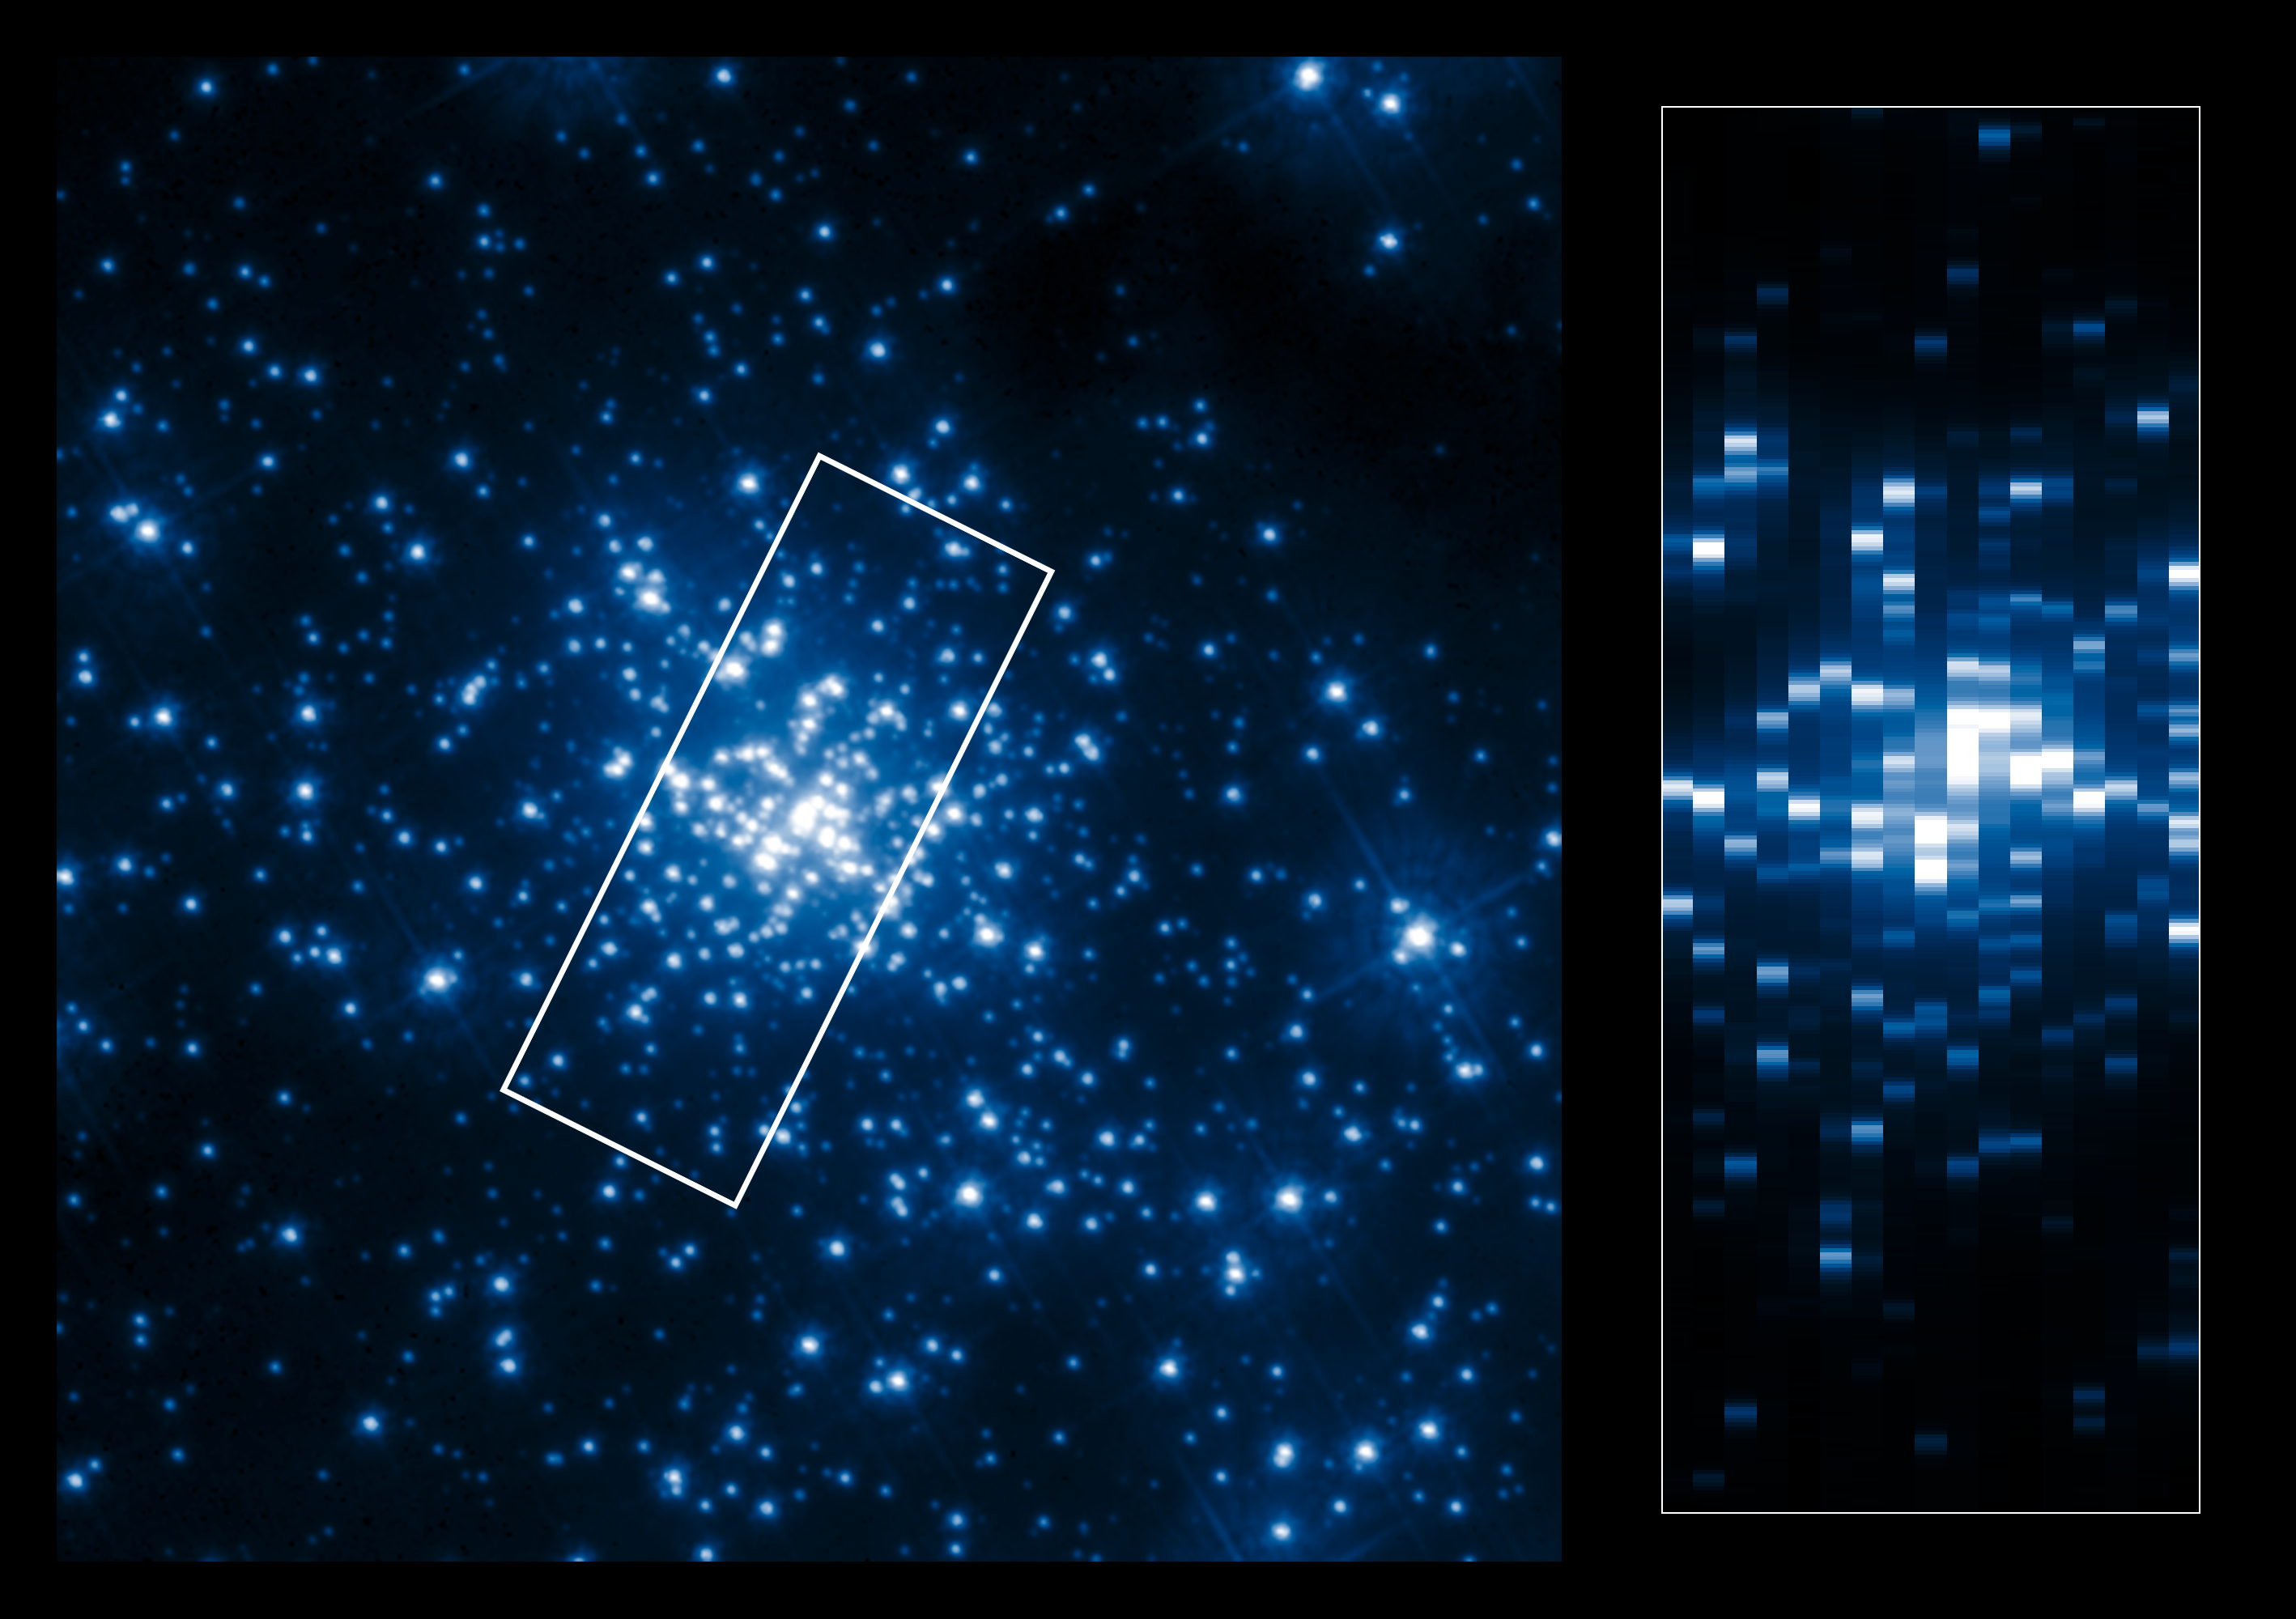

Pseudo image of R136

The left side of this collage shows the central part of the young star cluster R136 as it can be seen in the ultraviolet. Due to the high-resolution of Hubble in the ultraviolet the individual stars in this dense cluster can be resolved and studied.

The right side shows a pseudo-image, created from the UV spectra collected with the Space Telescope Imaging Spectrograph (STIS). These spectra have been used by scientists to determine the properties of the stars in R136. The boundary of the 17 slit locations is outlined in white in the left image. The long-slit data from the spectrograph have been compressed to the width of the slits and stacked to create a pseudo-image. This allows the slit locations to be matched to stars in the left image.

Credit: ESA/Hubble, NASA, K.A. Bostroem (STScI/UC Davis)